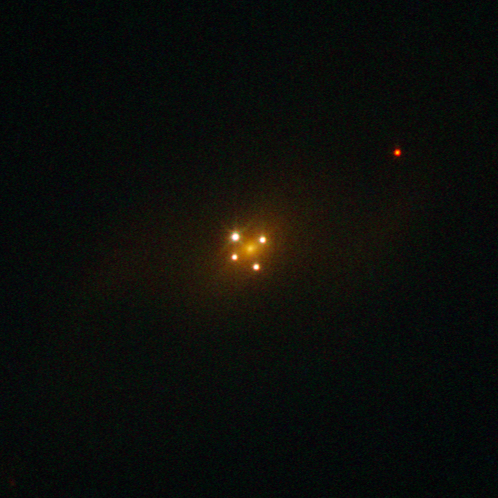

Seeing quadruple

This NASA/ESA Hubble Space Telescope picture may trick you into thinking that the galaxy in it — known as UZC J224030.2+032131 — has not one but five different nuclei. In fact, the core of the galaxy is only the faint and diffuse object seen at the centre of the cross-like structure formed by the other four dots, which are images of a distant quasar located in the background of the galaxy.

The picture shows a famous cosmic mirage known as the Einstein Cross, and is a direct visual confirmation of the theory of general relativity. It is one of the best examples of the phenomenon of gravitational lensing — the bending of light by gravity as predicted by Einstein in the early 20th century. In this case, the galaxy’s powerful gravity acts as a lens that bends and amplifies the light from the quasar behind it, producing four images of the distant object.

The quasar is seen as it was around 11 billion light-years ago, in the direction of the constellation of Pegasus, while the galaxy that works as a lens is some ten times closer. The alignment between the two objects is remarkable (within 0.05 arcseconds), which is in part why such a special type of gravitational lensing is observed.

This image is likely the sharpest image of the Einstein Cross ever made, and was produced by Hubble’s Wide Field and Planetary Camera 2, and has a field of view of 26 by 26 arcseconds.

Credit: ESA/Hubble & NASA